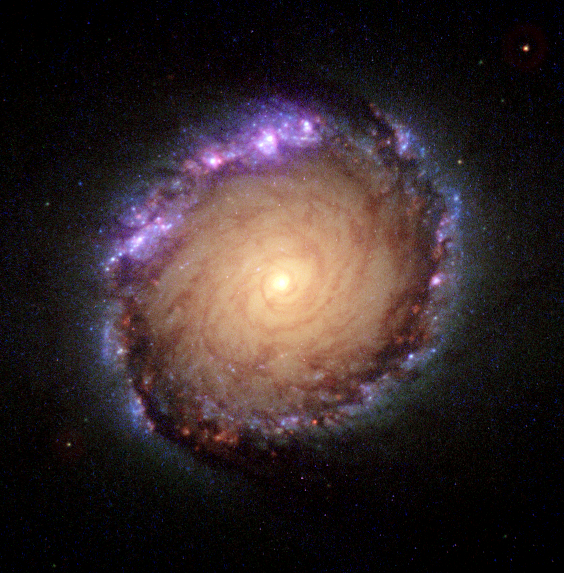

Composite ultraviolet-visible-infrared image of NGC 1512

This picture is a multi-wavelength composite made by seven individual exposures made with the NASA/ESA Hubble Space Telescope. These exposures were taken by the Faint Object Camera (FOC), Wide Field and Planetary Camera 2 (WFPC2), and the Near Infrared Camera and Multi-Object Spectrometer (NICMOS).

This image is issued jointly by NASA and ESA.

Credit: NASA, ESA, Dan Maoz (Tel-Aviv University, Israel, and Columbia University, USA)